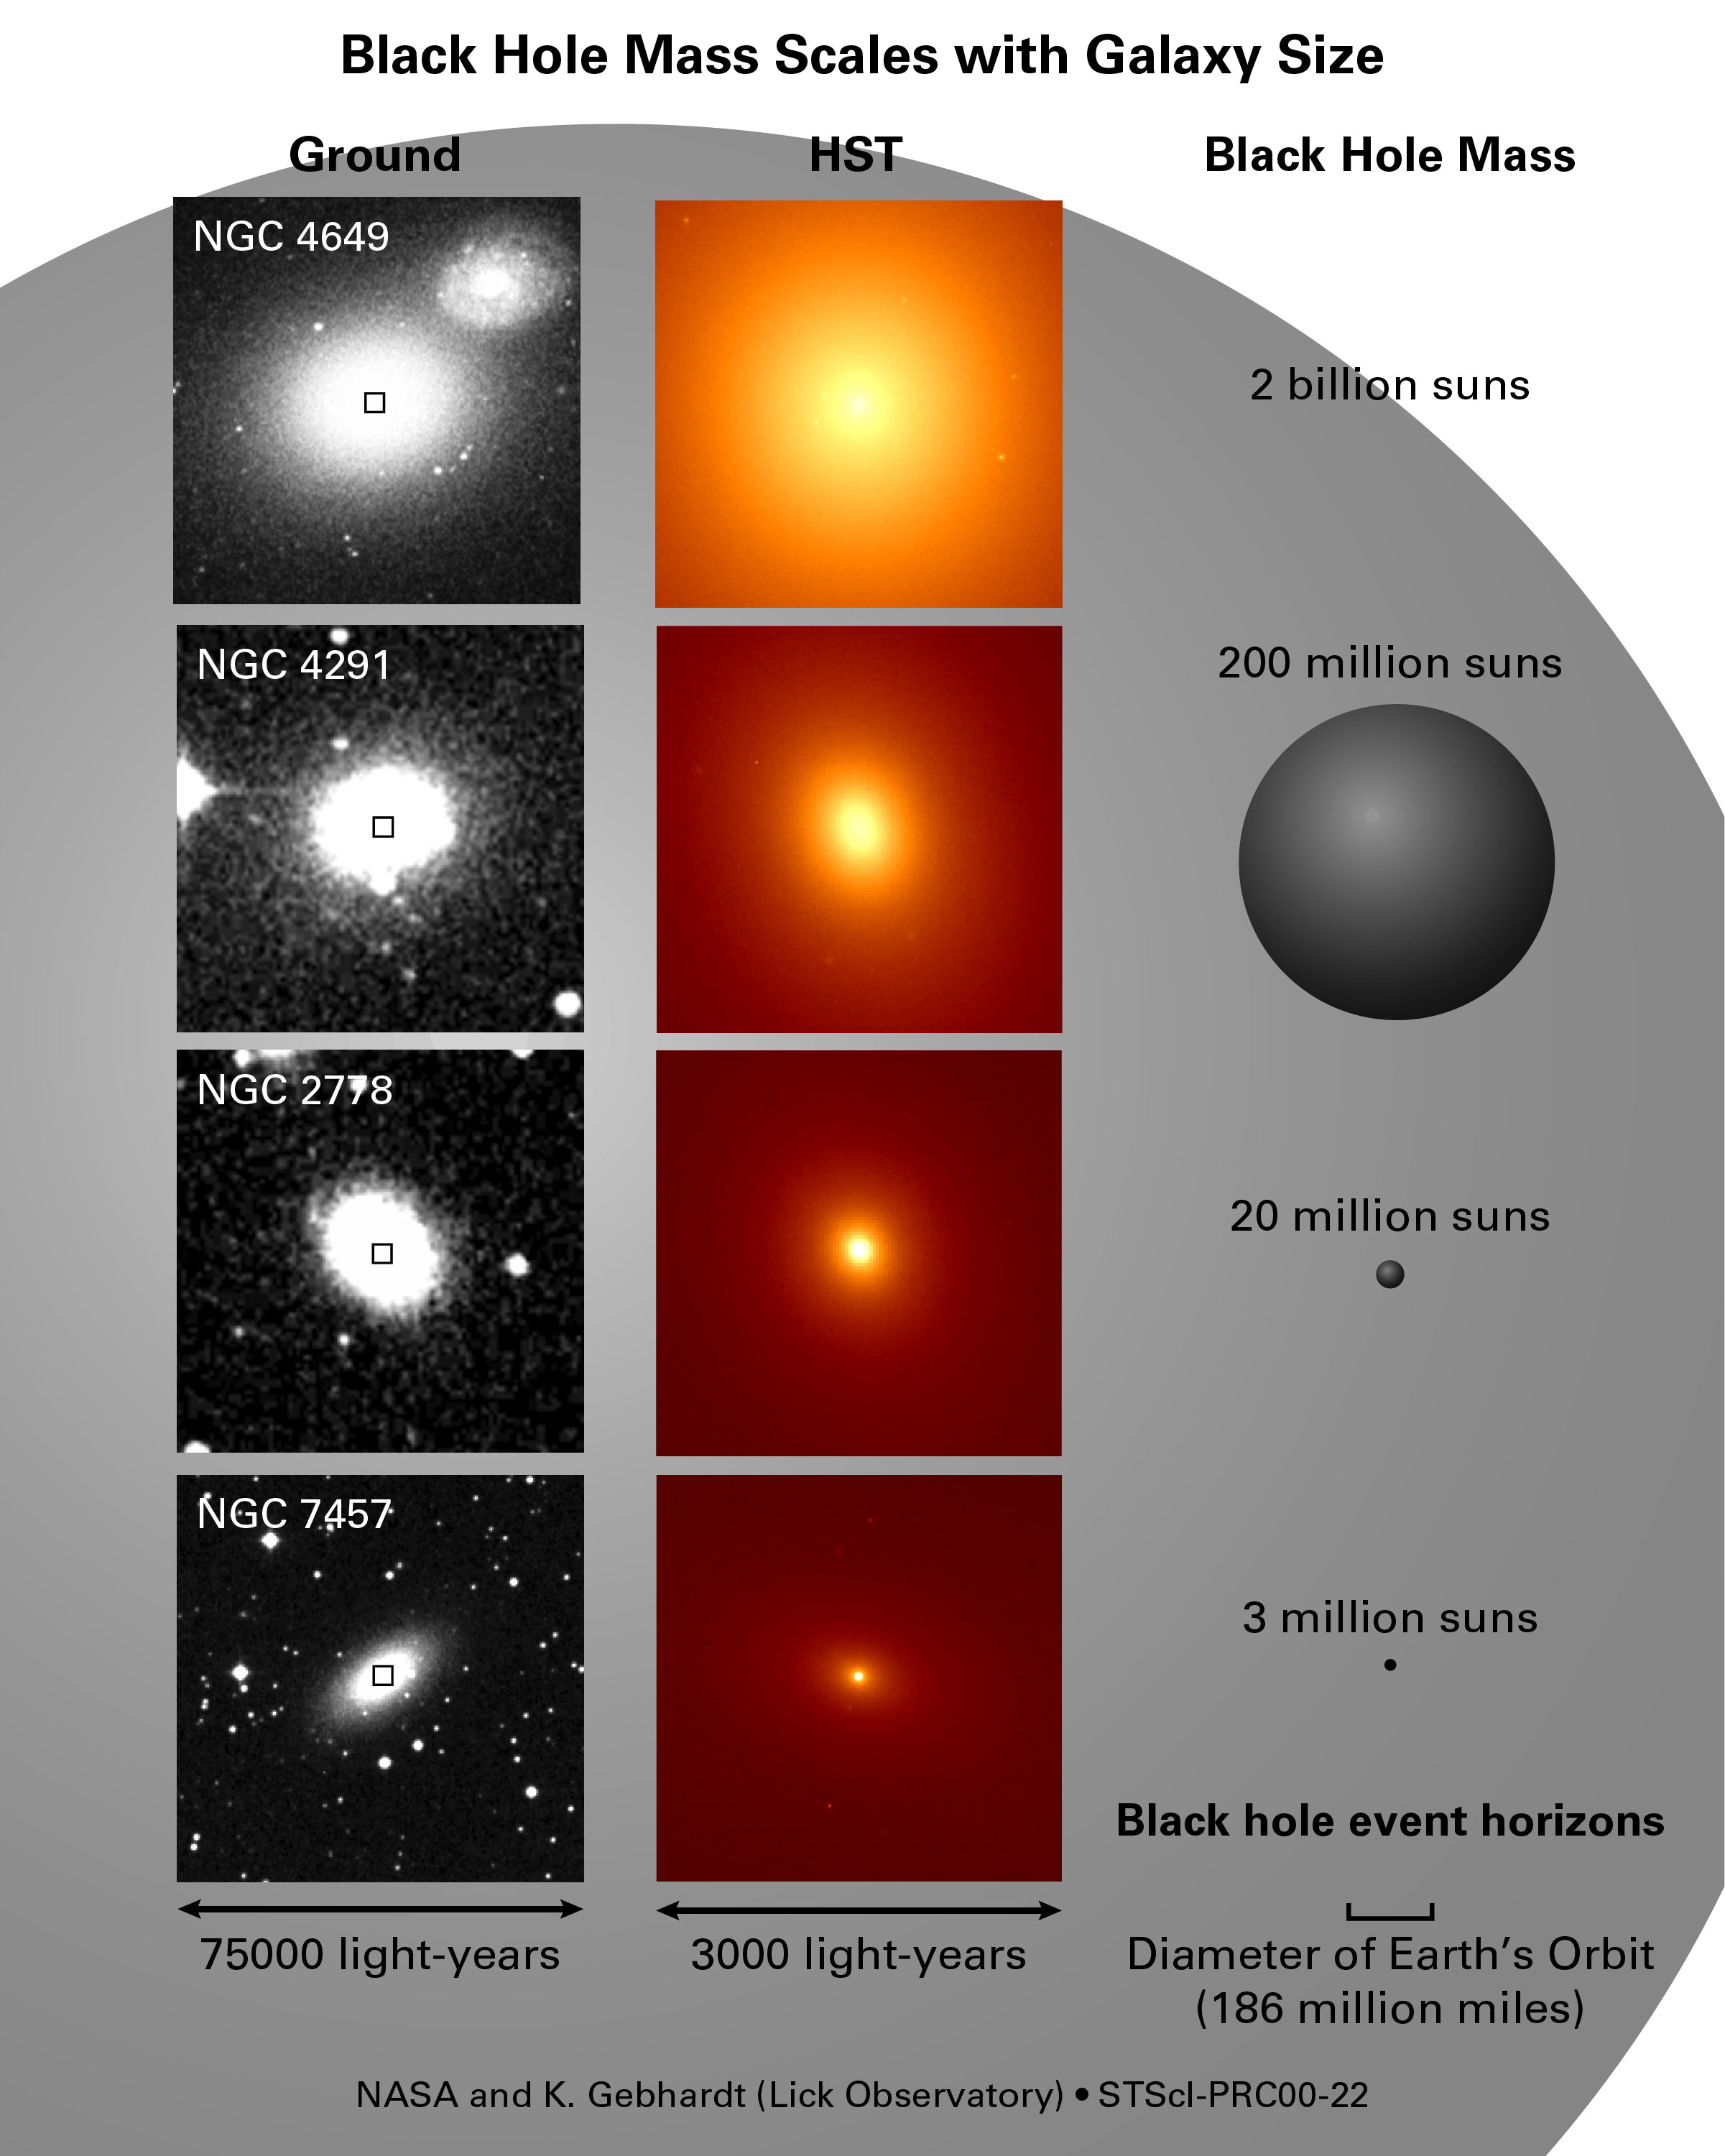

Black holes shed light on galaxy formation

Astronomers are concluding that monstrous black holes weren't simply born big but instead grew on a measured diet of gas and stars controlled by their host galaxies in the early formative years of the universe. These results, gleaned from a NASA/ESA Hubble Space Telescope census of more than 30 galaxies, are painting a broad picture of a galaxy's evolution and its long and intimate relationship with its central giant black hole. Though much more analysis remains, an initial look at Hubble evidence favors the idea that titanic black holes did not precede a galaxy's birth but instead co-evolved with the galaxy by trapping a surprisingly exact percentage of the mass of the central hub of stars and gas in a galaxy.

Credit: NASA/ESA, Karl Gebhardt (Lick Observatory)